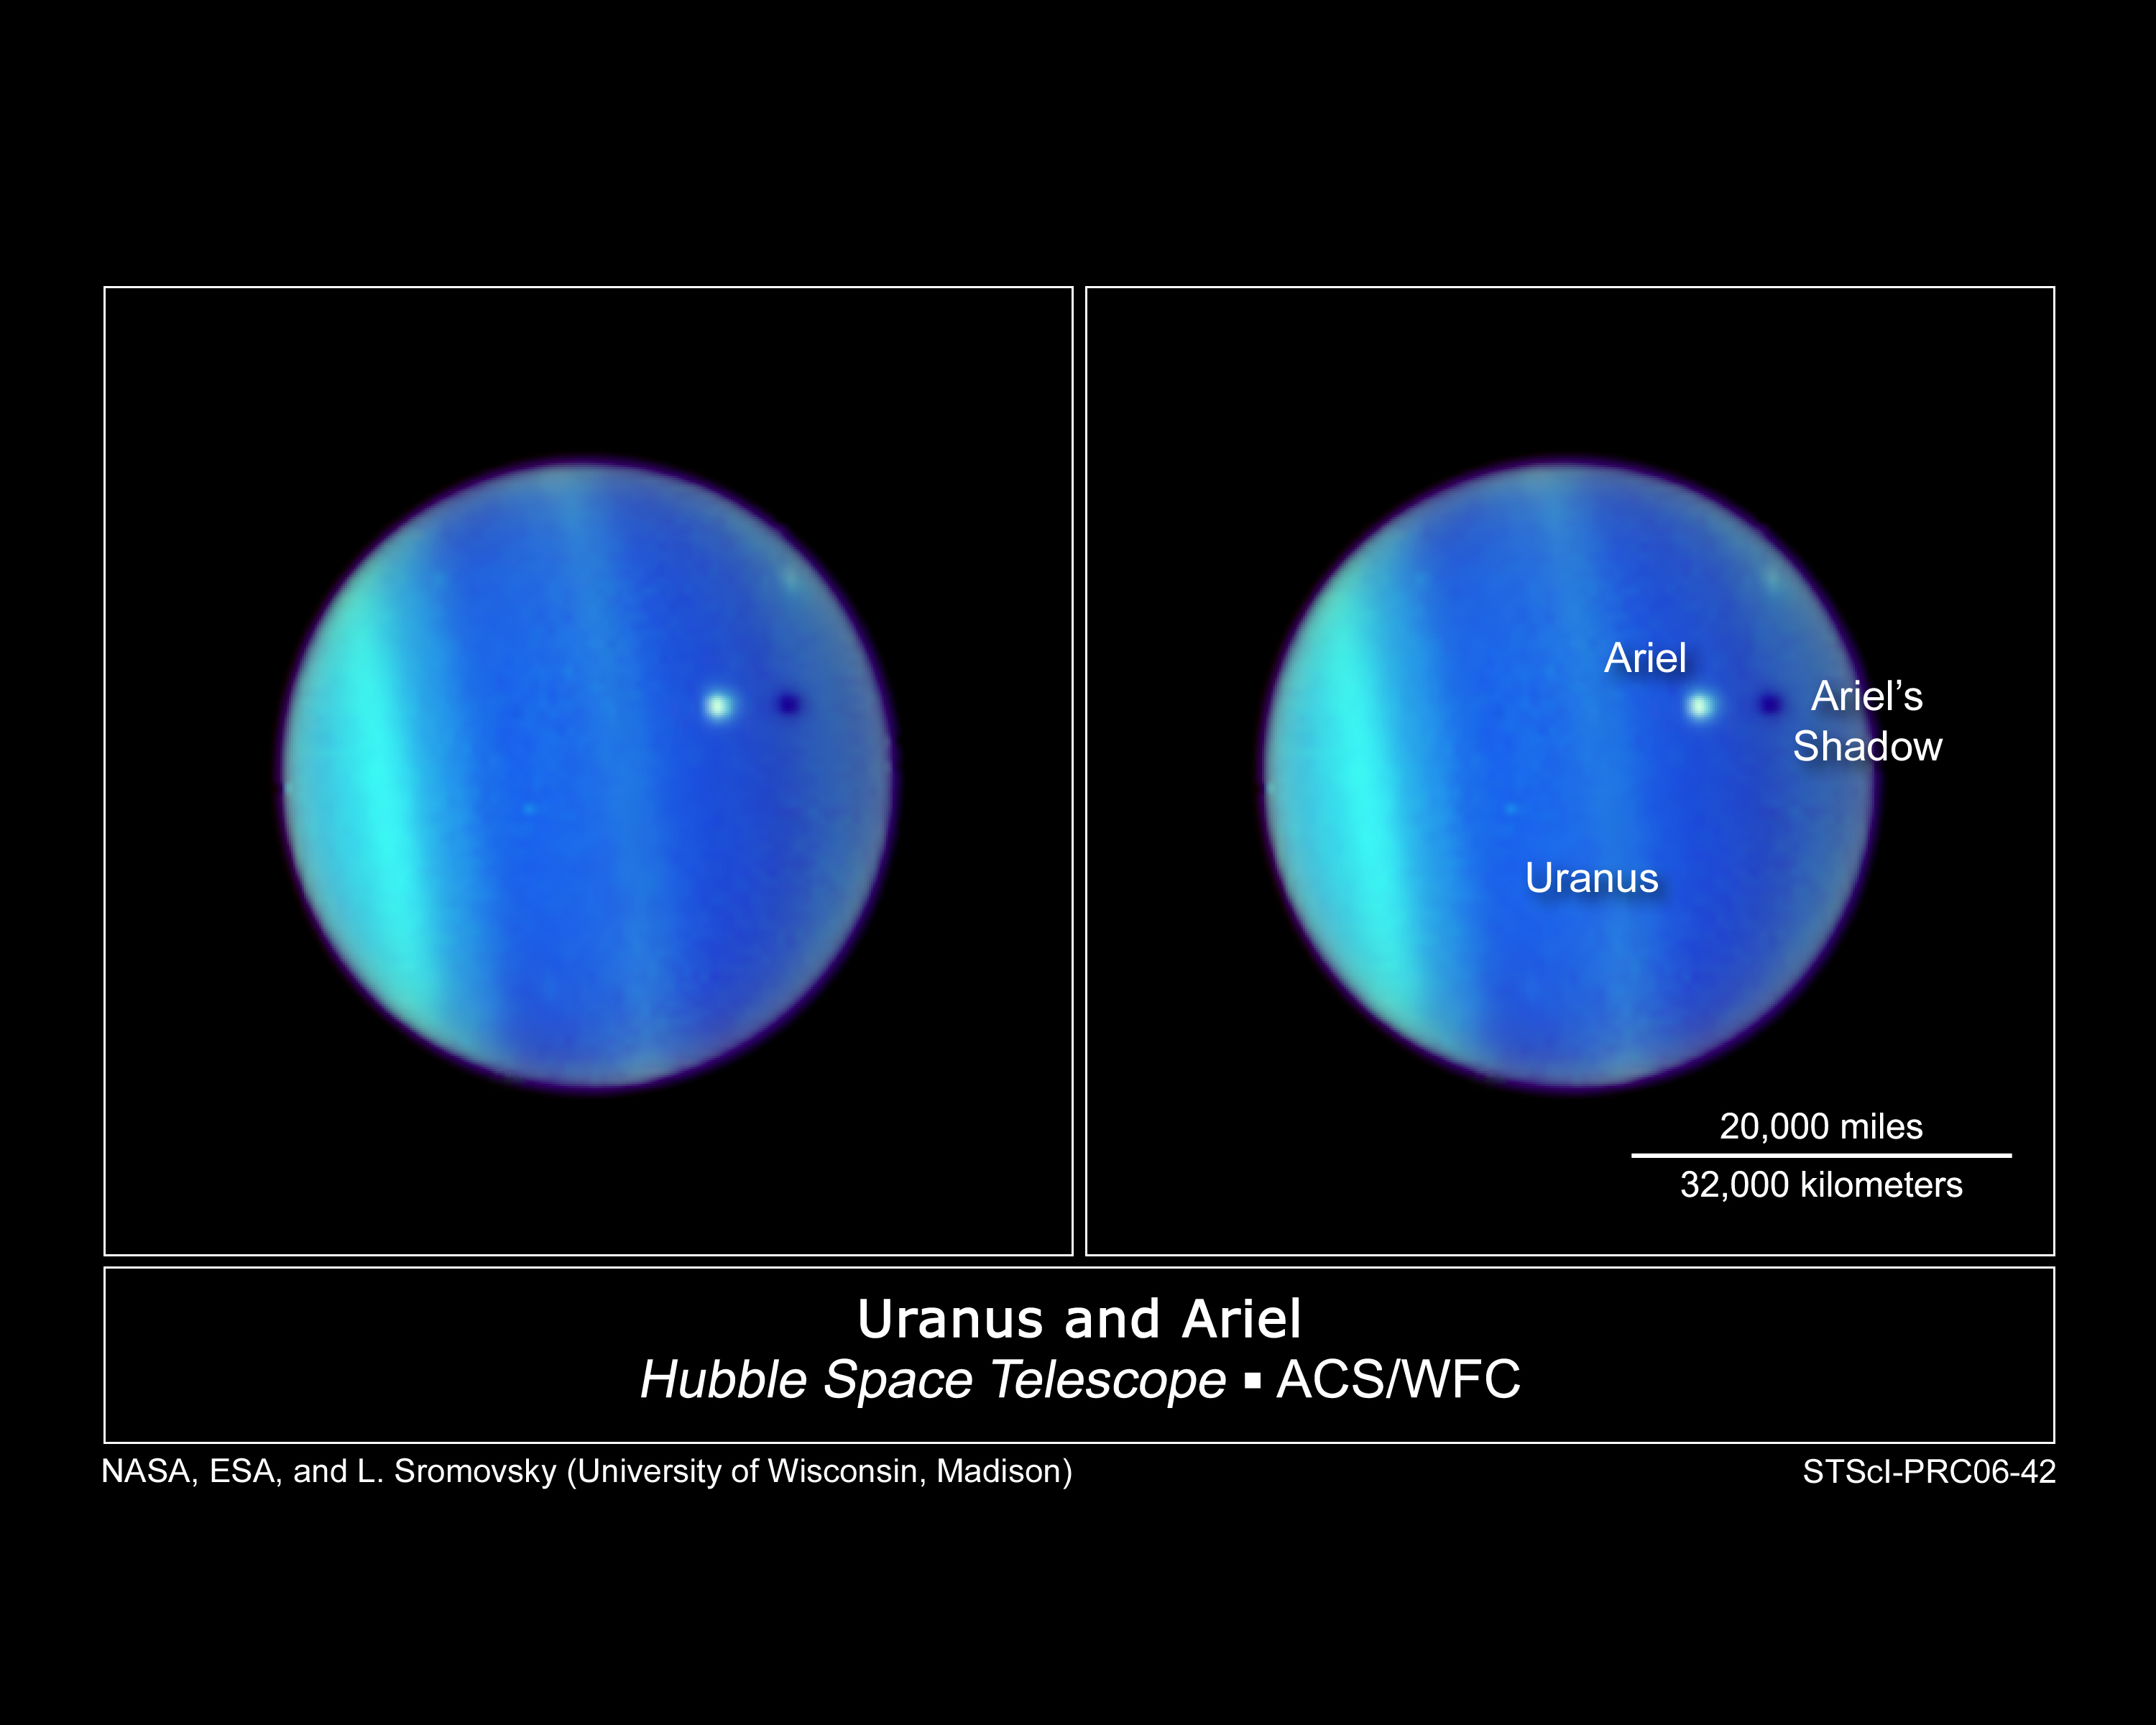

Uranus and Ariel

This image is a never-before-seen astronomical alignment of a moon traversing the face of Uranus, and its accompanying shadow. The white dot near the center of Uranus' blue-green disk is the icy moon Ariel. The 700-mile-diameter satellite is casting a shadow onto the cloud tops of Uranus. To an observer on Uranus, this would appear as a solar eclipse, where the moon briefly blocks out the Sun as its shadow races across Uranus's cloud tops.

Though such "transits" by moons across the disks of their parents are commonplace for some other gas giant planets, such as Jupiter, the satellites of Uranus orbit the planet in such a way that they rarely cast shadows on the planet's surface. Uranus is tilted so that its spin axis lies nearly in its orbital plane. The planet is essentially tipped over on its side. During the course of its orbit around the Sun, first one pole and then the other is alternately illuminated. As a result, Uranus has extreme seasons during its 84-year orbit around the Sun. The moons of Uranus orbit the planet above the equator, so their paths align edge-on to the Sun only every 42 years.

This transit has never been observed before because Uranus is just now approaching its 2007 equinox when the Sun will shine directly over the giant planet's equator. The last time a Uranian equinox occurred, when transits could have been observed, was in 1965. However, telescopes of that era did not have the image sharpness required to view satellite transits on Uranus. When Hubble was launched in 1990, the Sun was shining over Uranus's far northern latitudes. Over the past decade Hubble astronomers have seen the Sun's direct illumination creep toward equatorial latitudes and the moons' orbits approach an edge-on configuration.

Ariel, named for a mischievous airy spirit in Shakespeare's "The Tempest," is only one-third the size of Earth's moon. Ariel is the nearest large satellite to Uranus. As Uranus approaches equinox, there will be additional eclipses by the large moons Umbriel, Titania, and Oberon, and by many smaller moons.

Lawrence A. Sromovsky of the University of Wisconsin-Madison, Heidi B. Hammel of the Space Science Institute, Boulder, Colorado, and Kathy A. Rages of the SETI Institute, Mountain View, California, created this colour composite image from images at three wavelengths in near infrared light obtained with Hubble's Advanced Camera for Surveys on July 26, 2006.

Credit: NASA, ESA, L. Sromovsky (University of Wisconsin, Madison), H. Hammel (Space Science Institute), and K. Rages (SETI)